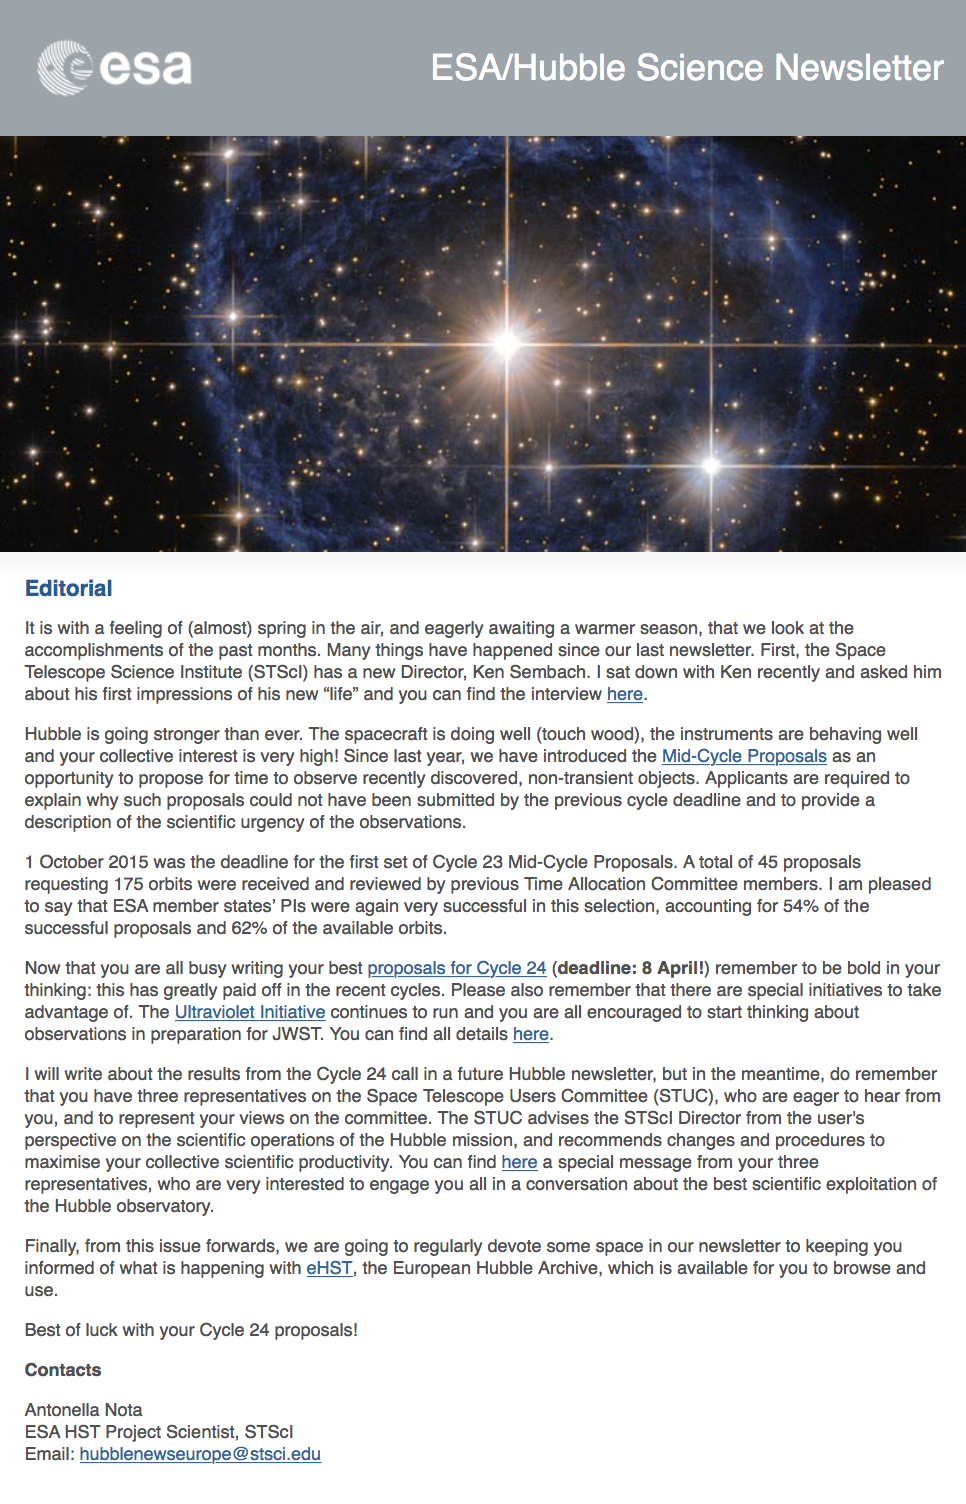

Screenshot of the March 2016 issue of the ESA/Hubble Science Newsletter

Screenshot of the March 2016 issue of the ESA/Hubble Science Newsletter.

Credit: NASA & ESA